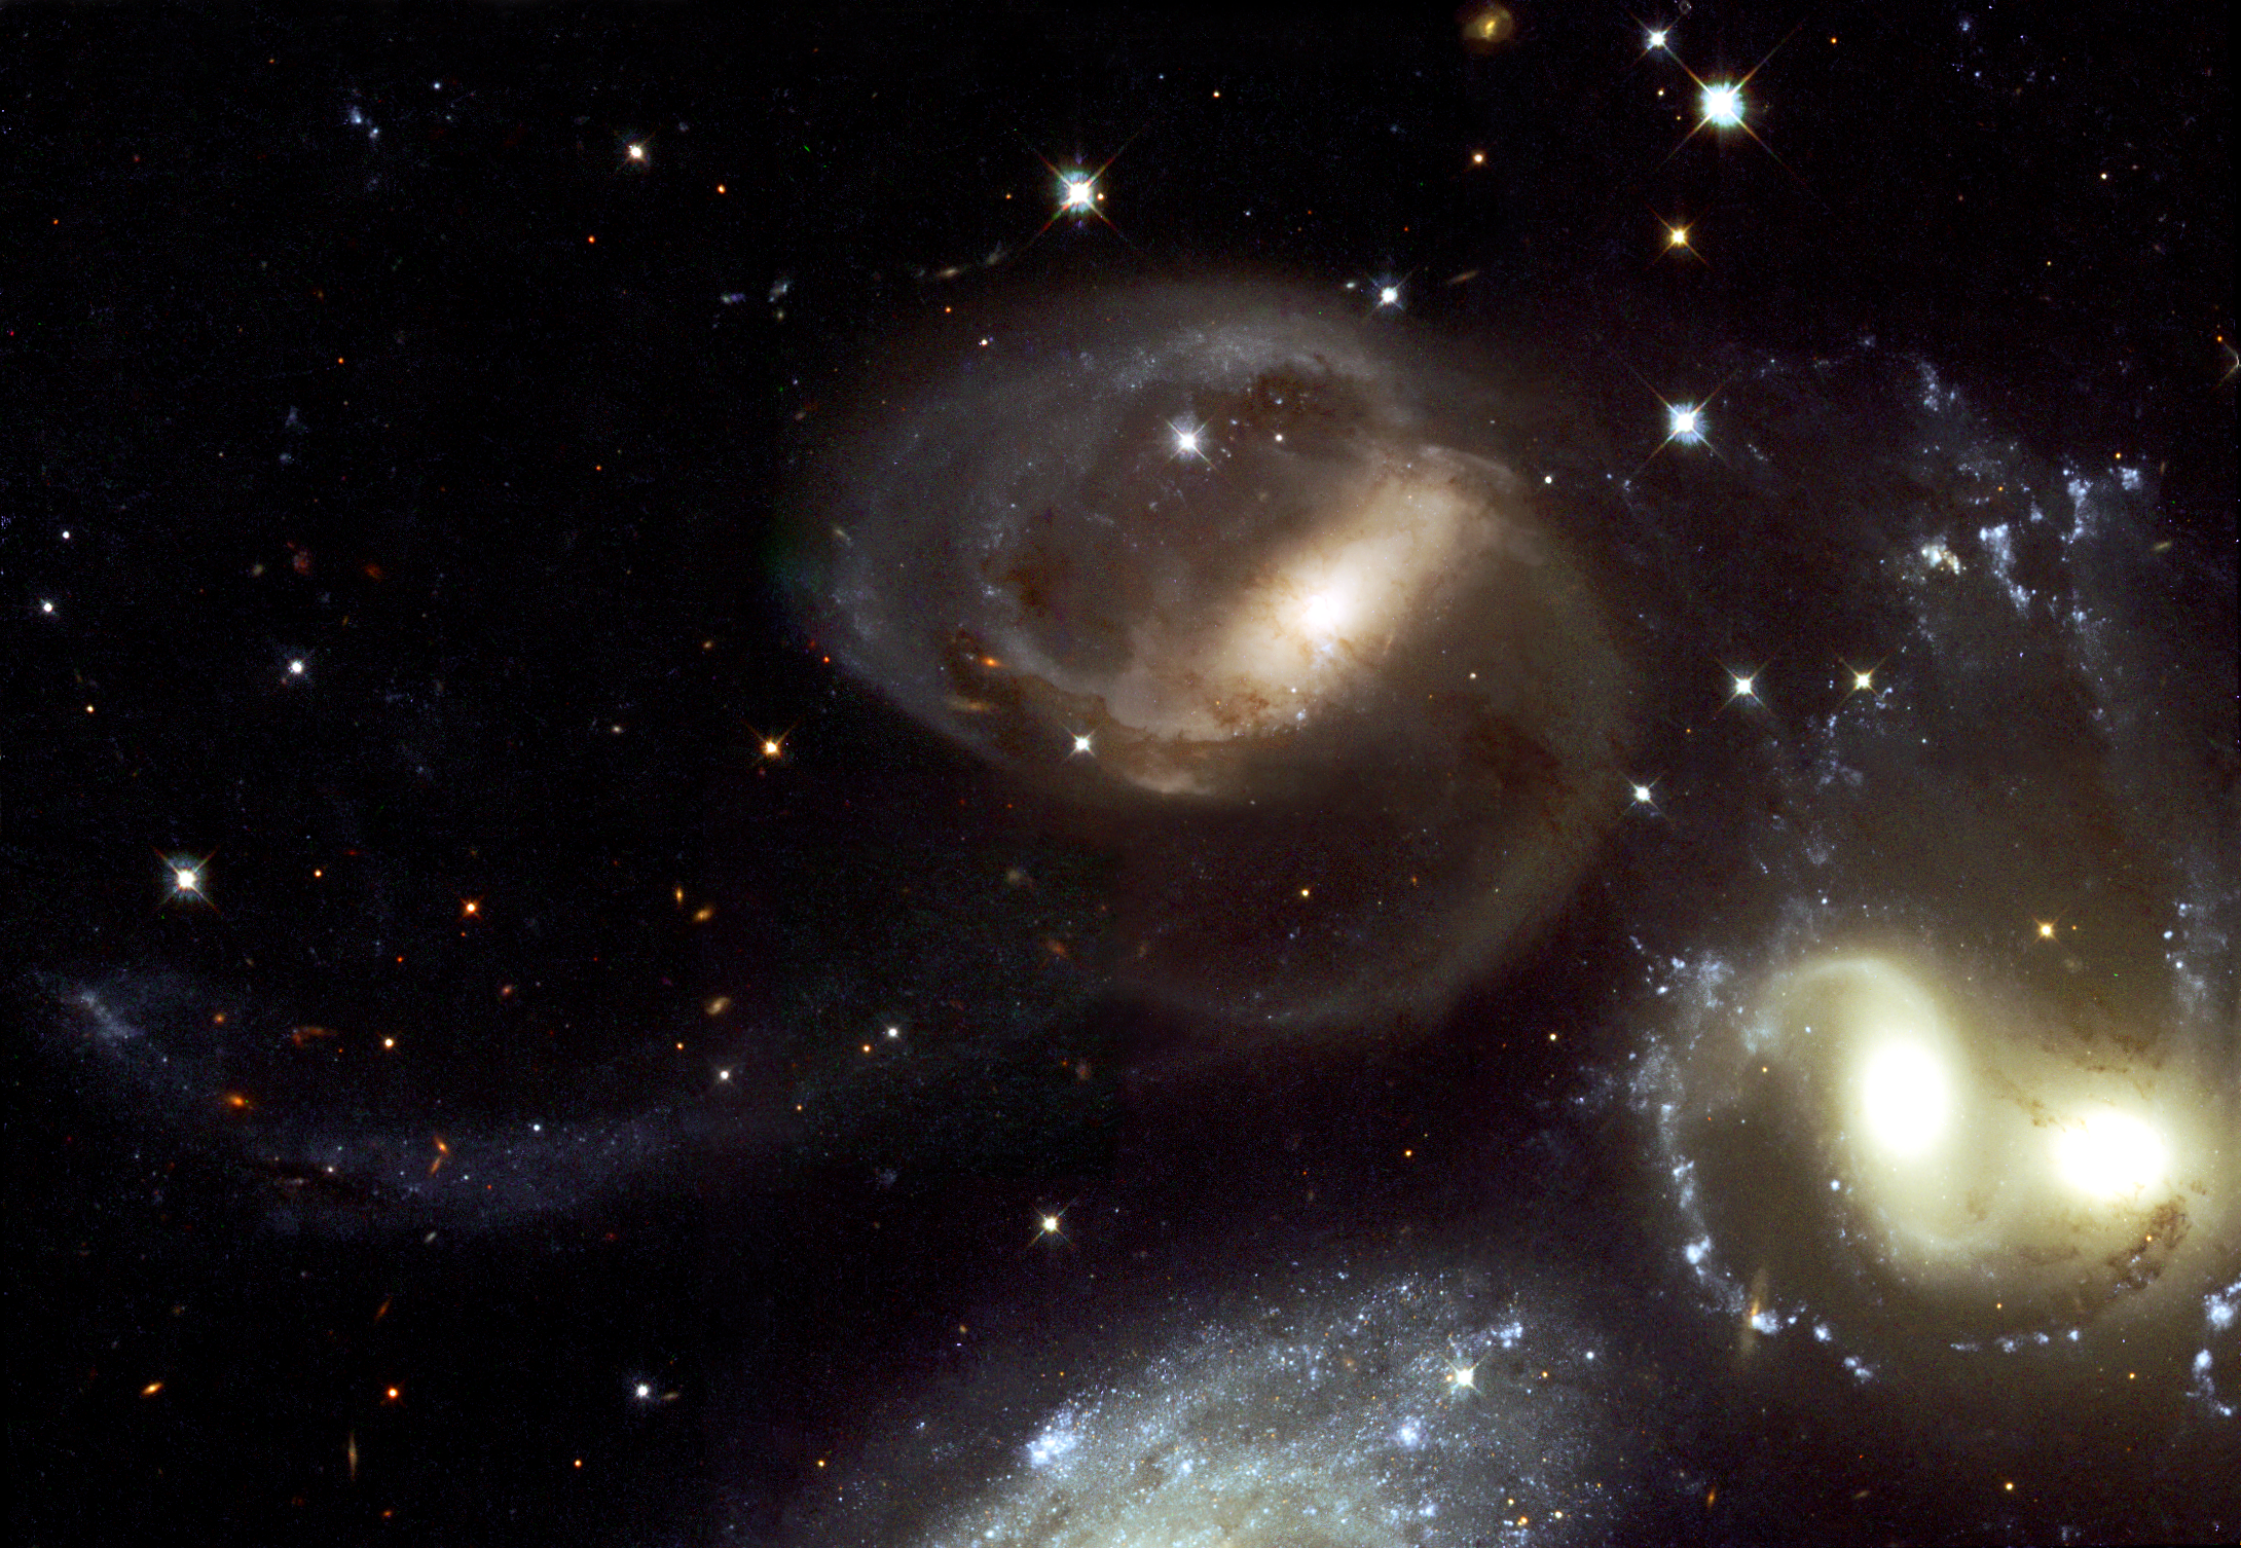

Stephan's Quintet - A mammoth cosmic collision (Hubble view)

This spectacular new image from the NASA/ESA Hubble Space Telescope of the group of galaxies called Stephan's Quintet has provided a detailed view of one of the most exciting star forming regions in the local Universe. Stephan's Quintet is a favoured object for amateur astronomers and has earned a reputation as a challenging target for good hobby telescopes. The quintet is a prototype of a class of objects known as compact groups of galaxies and has been studied intensively for decades. This NASA/ESA Hubble Space Telescope image is a close-up view of the central part of Stephan's Quintet, giving a magnificent view of a gigantic cosmic collision. Weird, highly distorted features, dust lanes crossing between galaxies and long filaments of stars and gas extending far beyond the central regions all suggest galaxies twisted by violent encounters. The galaxies float through space, distorted shapes moulded by tidal interactions, weaving together in the intricate figures of an immense cosmic dance, choreographed by gravity. This image comes from the large archive of scientific observations performed with the Hubble Space Telescope. It is a mosaic of two pointings with the WFPC2 instrument made in December 1998 and June 1999. The natural-colour composite has been constructed by the Hubble European Space Agency Information Centre from individual exposures in red light (814W filter, 2000 seconds), in green light (569W filter, 3200 seconds) and in blue light (450W filter, 6800 seconds). The image measures 3.7 x 2.5 arc-minute

Credit: ESA